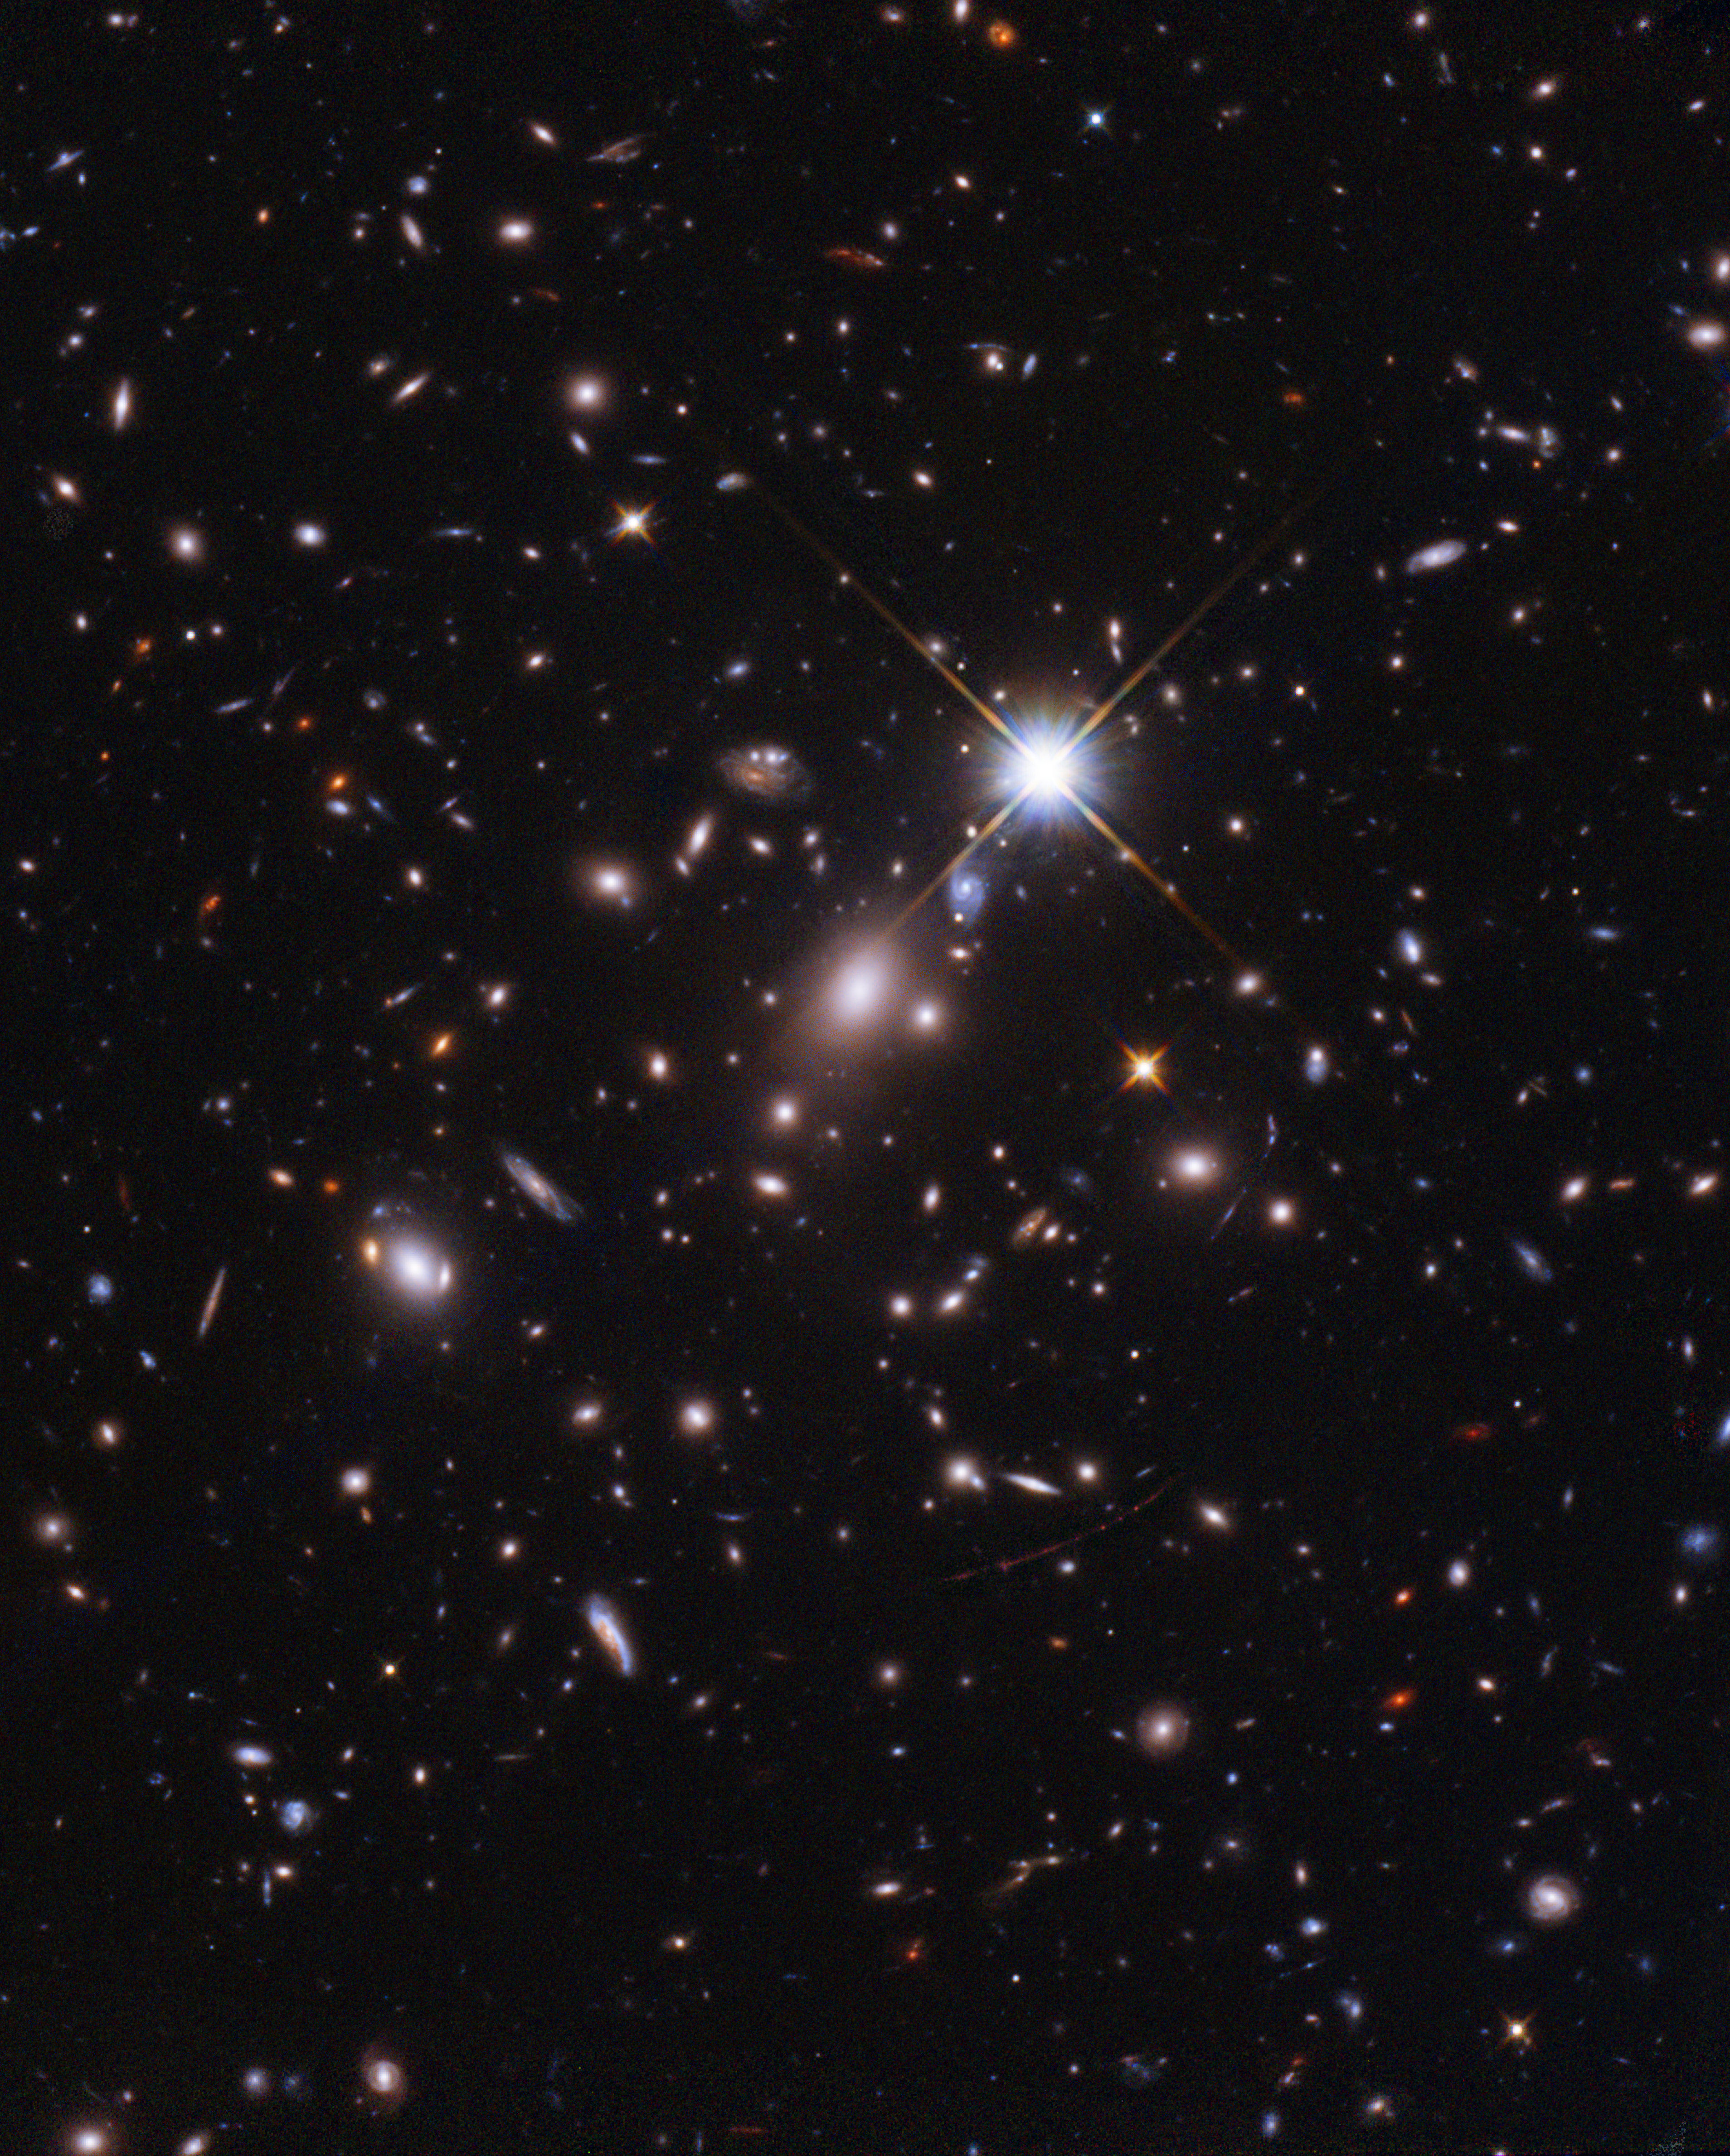

Hubble Finds the Most Distant Star Ever Seen

With this observation, the NASA/ESA Hubble Space Telescope has established an extraordinary new benchmark: detecting the light of a star that existed within the first billion years after the Universe’s birth in the Big Bang (at a redshift of 6.2) — the most distant individual star ever seen. This sets up a major target for the NASA/ESA/CSA James Webb Space Telescope in its first year.

Credit: NASA, ESA, B. Welch (JHU), D. Coe (STScI), A. Pagan (STScI)